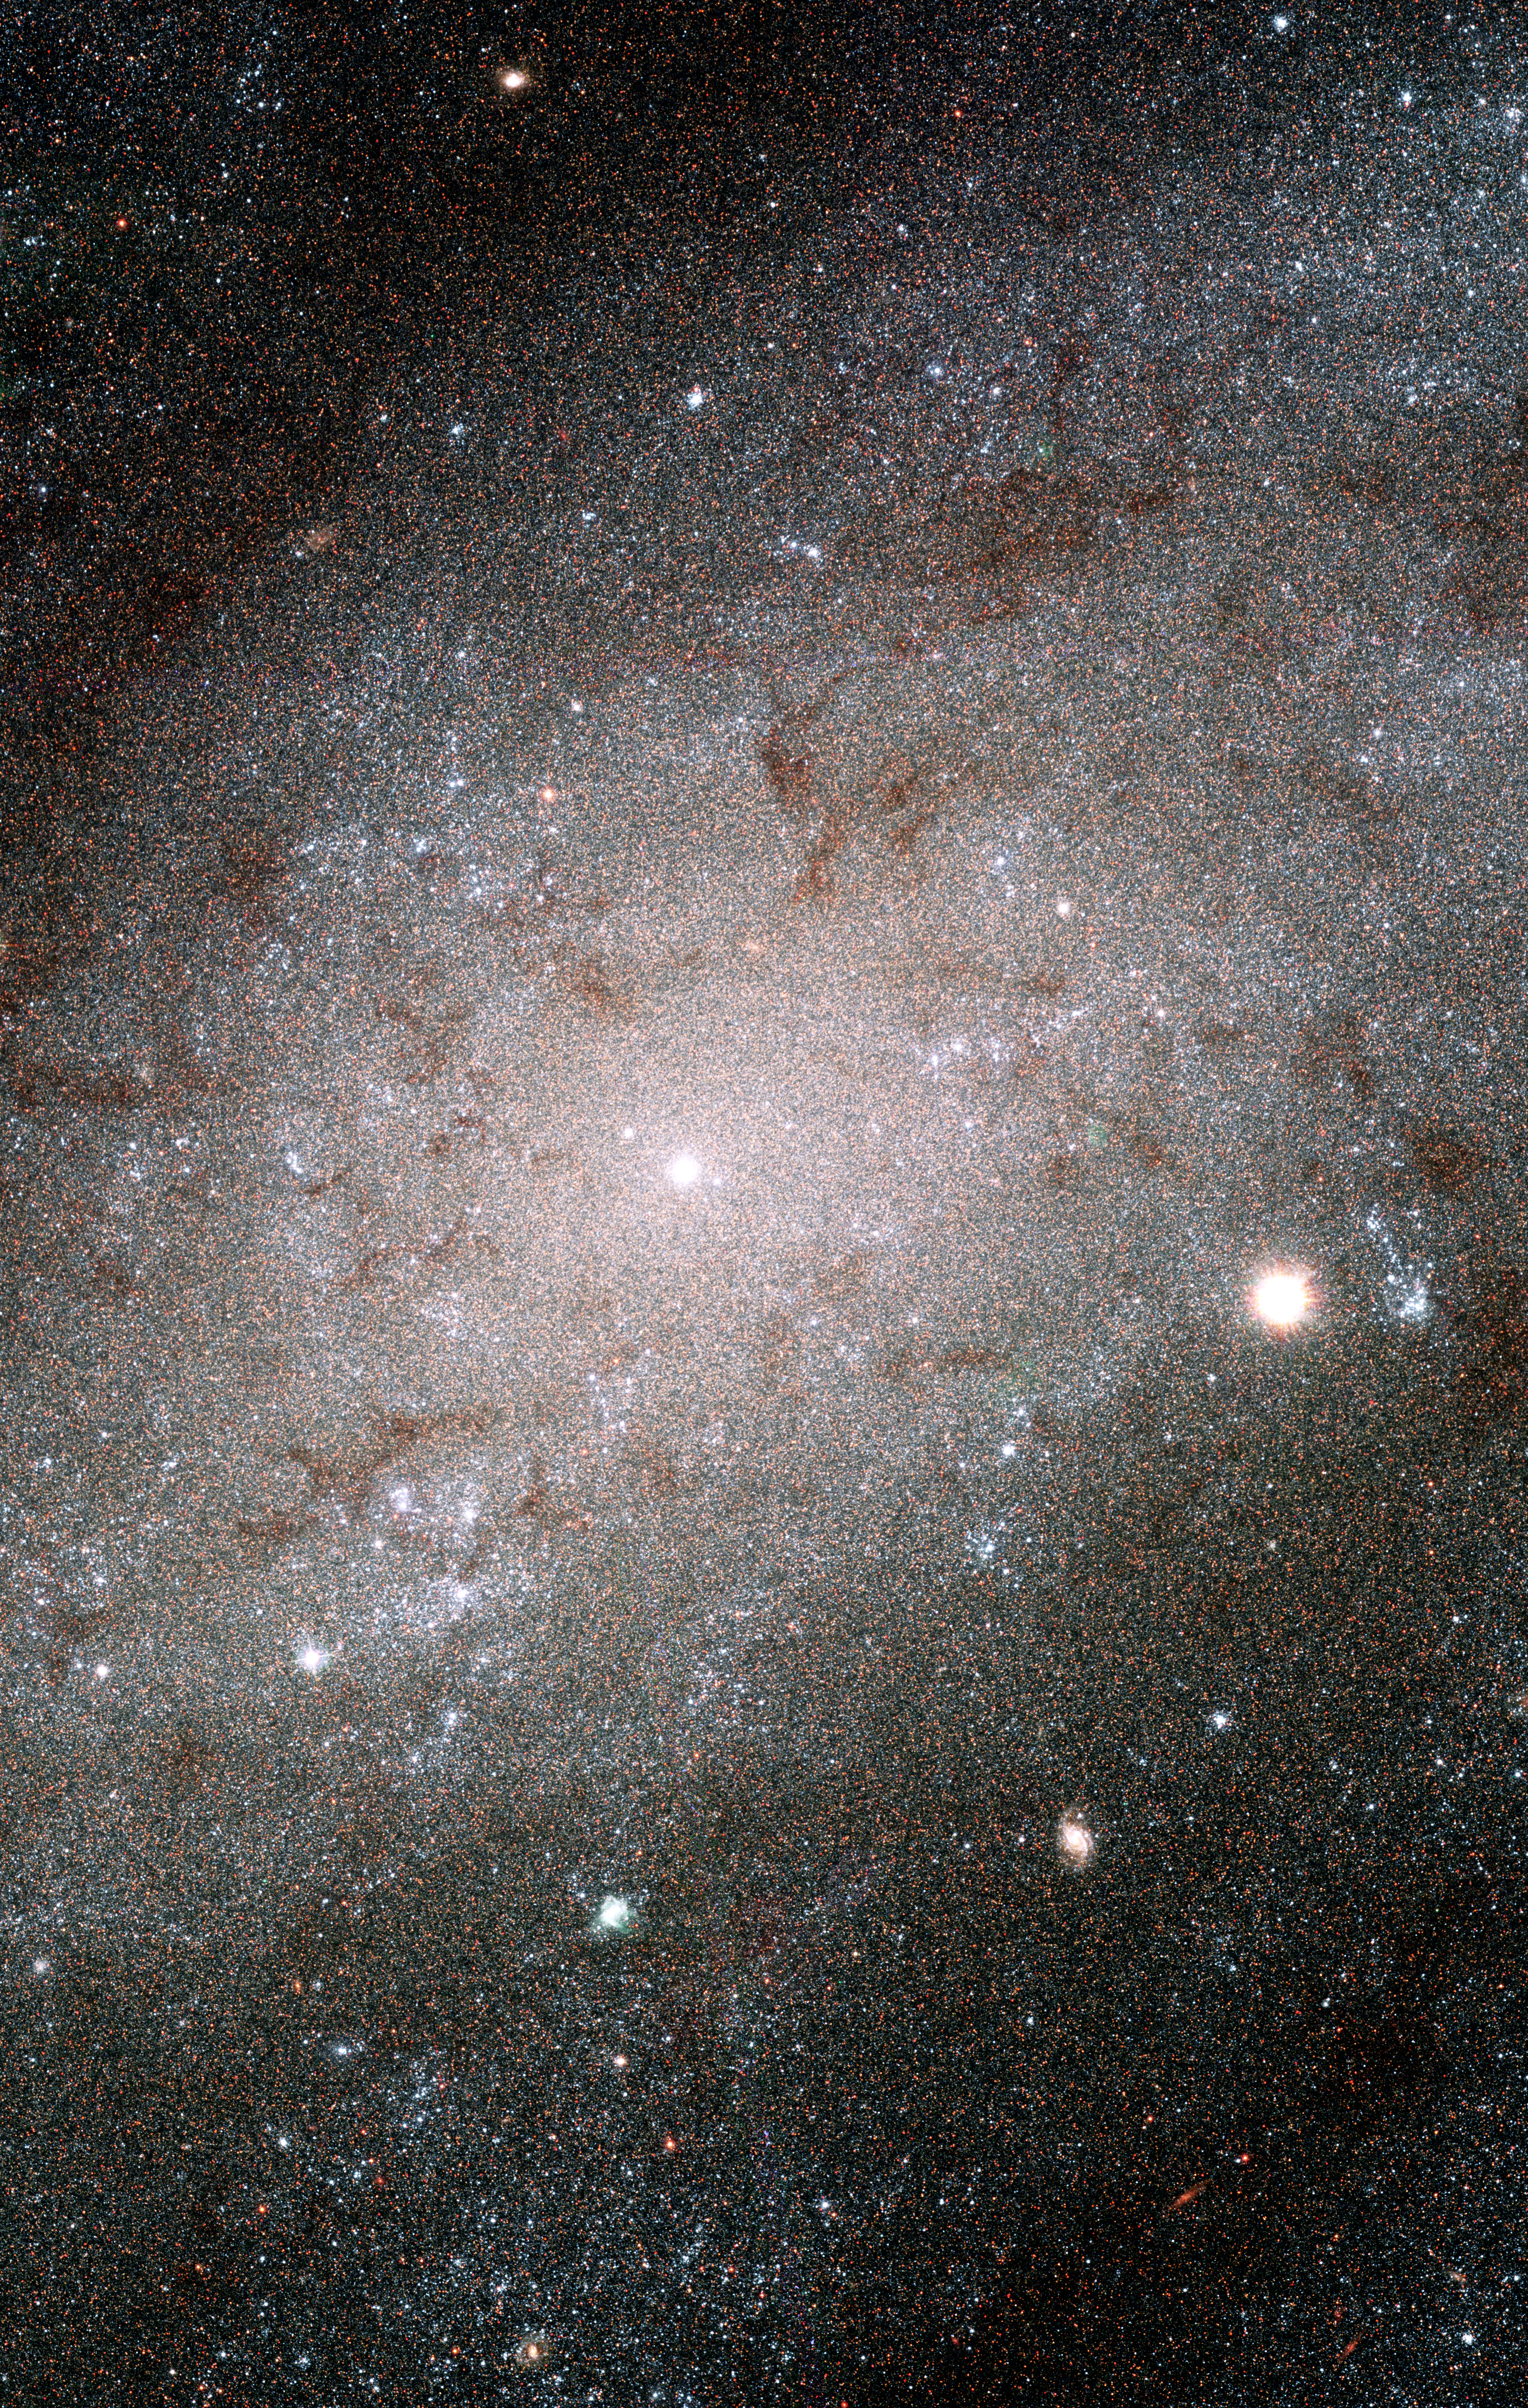

Hubble sees stars as numerous as grains of sand in nearby galaxy

Myriads of stars embedded in the heart of the nearby galaxy NGC 300 can be singled out like grains of sand on a beach in this Hubble Space Telescope image. The Hubble telescope's exquisite resolution enables it to see the stars as individual points of light, despite the fact that the galaxy is millions of light-years away.

NGC 300 is a spiral galaxy similar to our own Milky Way galaxy. It is a member of a nearby group of galaxies known as the Sculptor group, named for the southern constellation where the group can be found. The distance to NGC 300 is 6.5 million light-years, making it one of the Milky Way's closer neighbors. At this distance, only the brightest stars can be picked out from ground-based images. With a resolution some 10 times better than ground-based telescopes, Hubble's Advanced Camera for Surveys (ACS) resolves many more stars in this galaxy than can be detected from the ground.

The colour composite was made from filtered images taken in blue, green, and infrared light. Hot, young blue stars appear in clusters that form in the galaxy's spiral arms. Ribbons of deep red stars mark the location of gauzy curtains of dust that partially hide the light of the stars behind them. Near the center of the image is the bright and compact nucleus of the galaxy where even the ACS loses the ability to separate the densely packed stars.

The individual exposures that were combined to make this new image were taken in July and September 2002. These Hubble data are being used to test a new method for measuring distances to galaxies and to compare it with the more traditional methods, such as the period-luminosity relationship of pulsating stars known as Cepheid variables. Measuring distances is a perpetual but important concern for astronomers.

Some of the luminous blue specks in this image, young and massive stars called blue supergiants, are among the brightest stars seen in spiral galaxies like NGC 300. By combining the stellar brightness with other information, such as the stellar temperature, surface gravity and mass outflow, astronomers are defining a new technique to measure distances to galaxies located millions of light-years away.

Credit: NASA, ESA, and The Hubble Heritage Team (AURA/STScI)